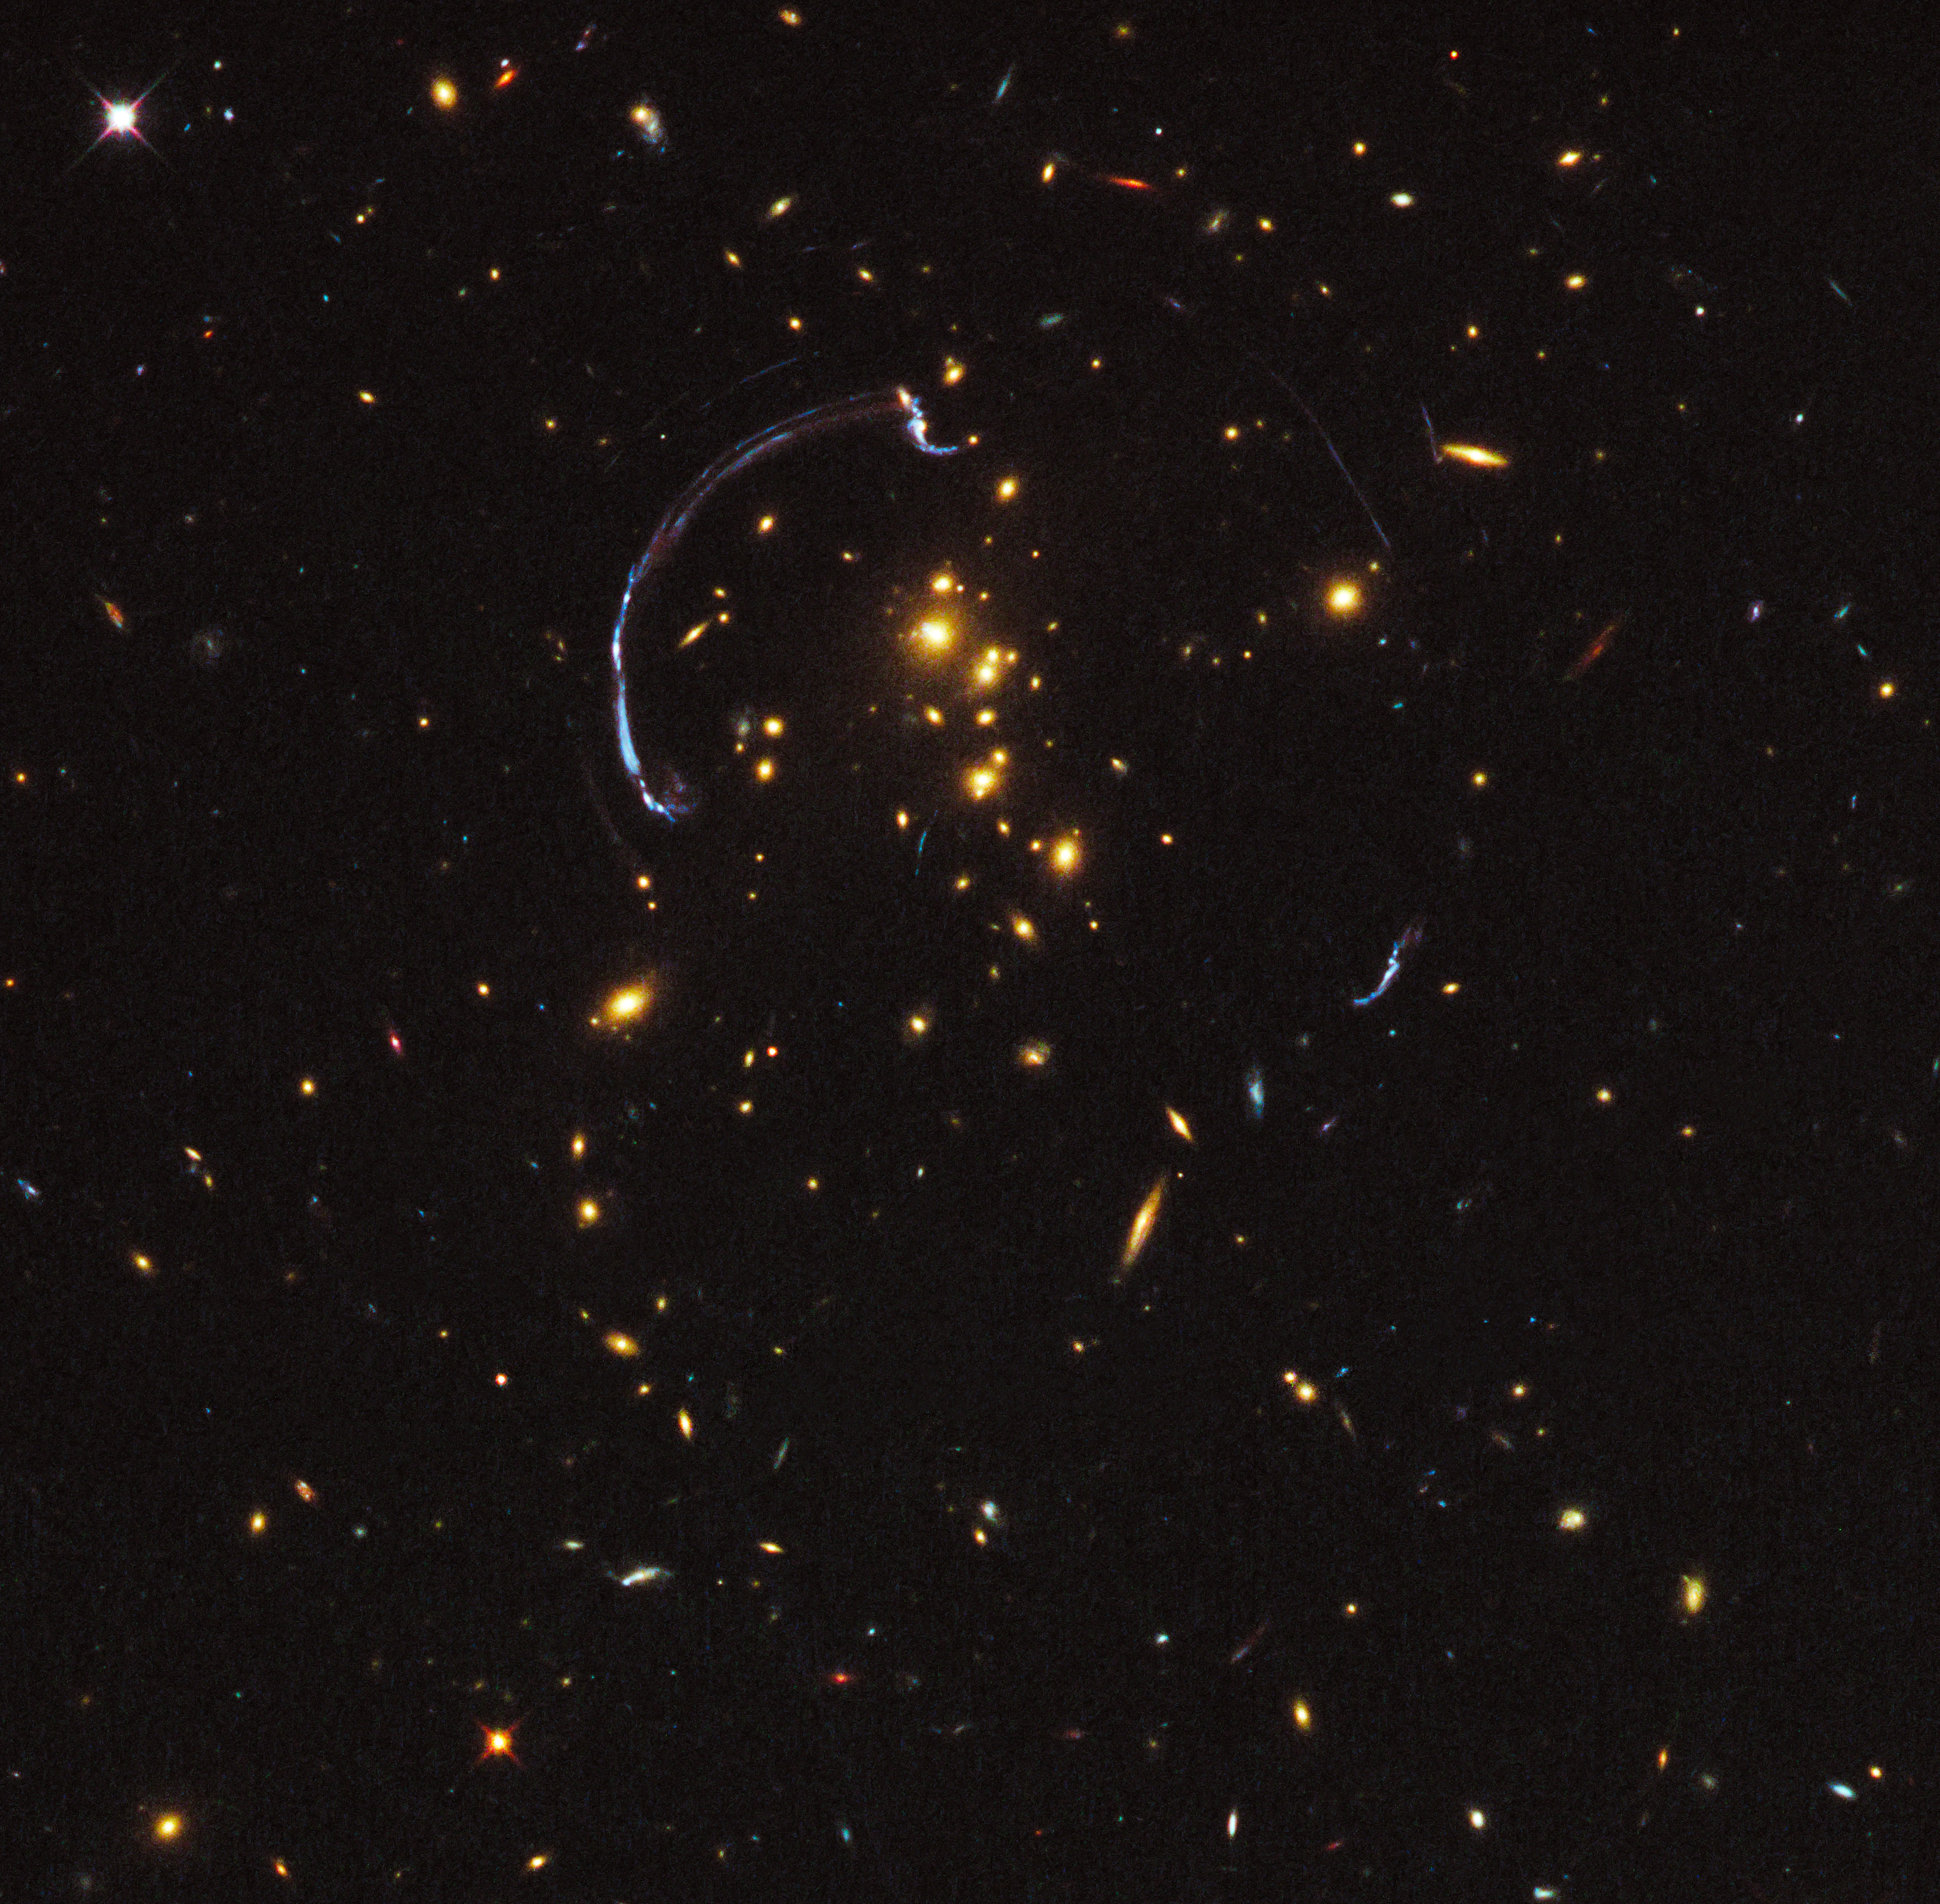

Galaxy cluster RCS2 032727-132623 (uncropped)

Galaxy cluster RCS2 032727-132623 (uncropped).

Credit: NASA, ESA, J. Rigby (NASA Goddard Space Flight Center), K. Sharon (Kavli Institute for Cosmological Physics, University of Chicago), M. Gladders and E. Wuyts (University of Chicago), and the Hubble Heritage Team (STScI/AURA)